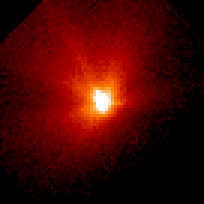

Comet Hale-Bopp

This is a series of Hubble Space Telescope observations of the region around the nucleus of Hale-Bopp, taken on eight different dates since September 1995. They chronicle changes in the evolution of the nucleus as it moves ever closer to, and is warmed by, the sun.

Credit: Harold Weaver (Johns Hopkins University) and NASA/ESA